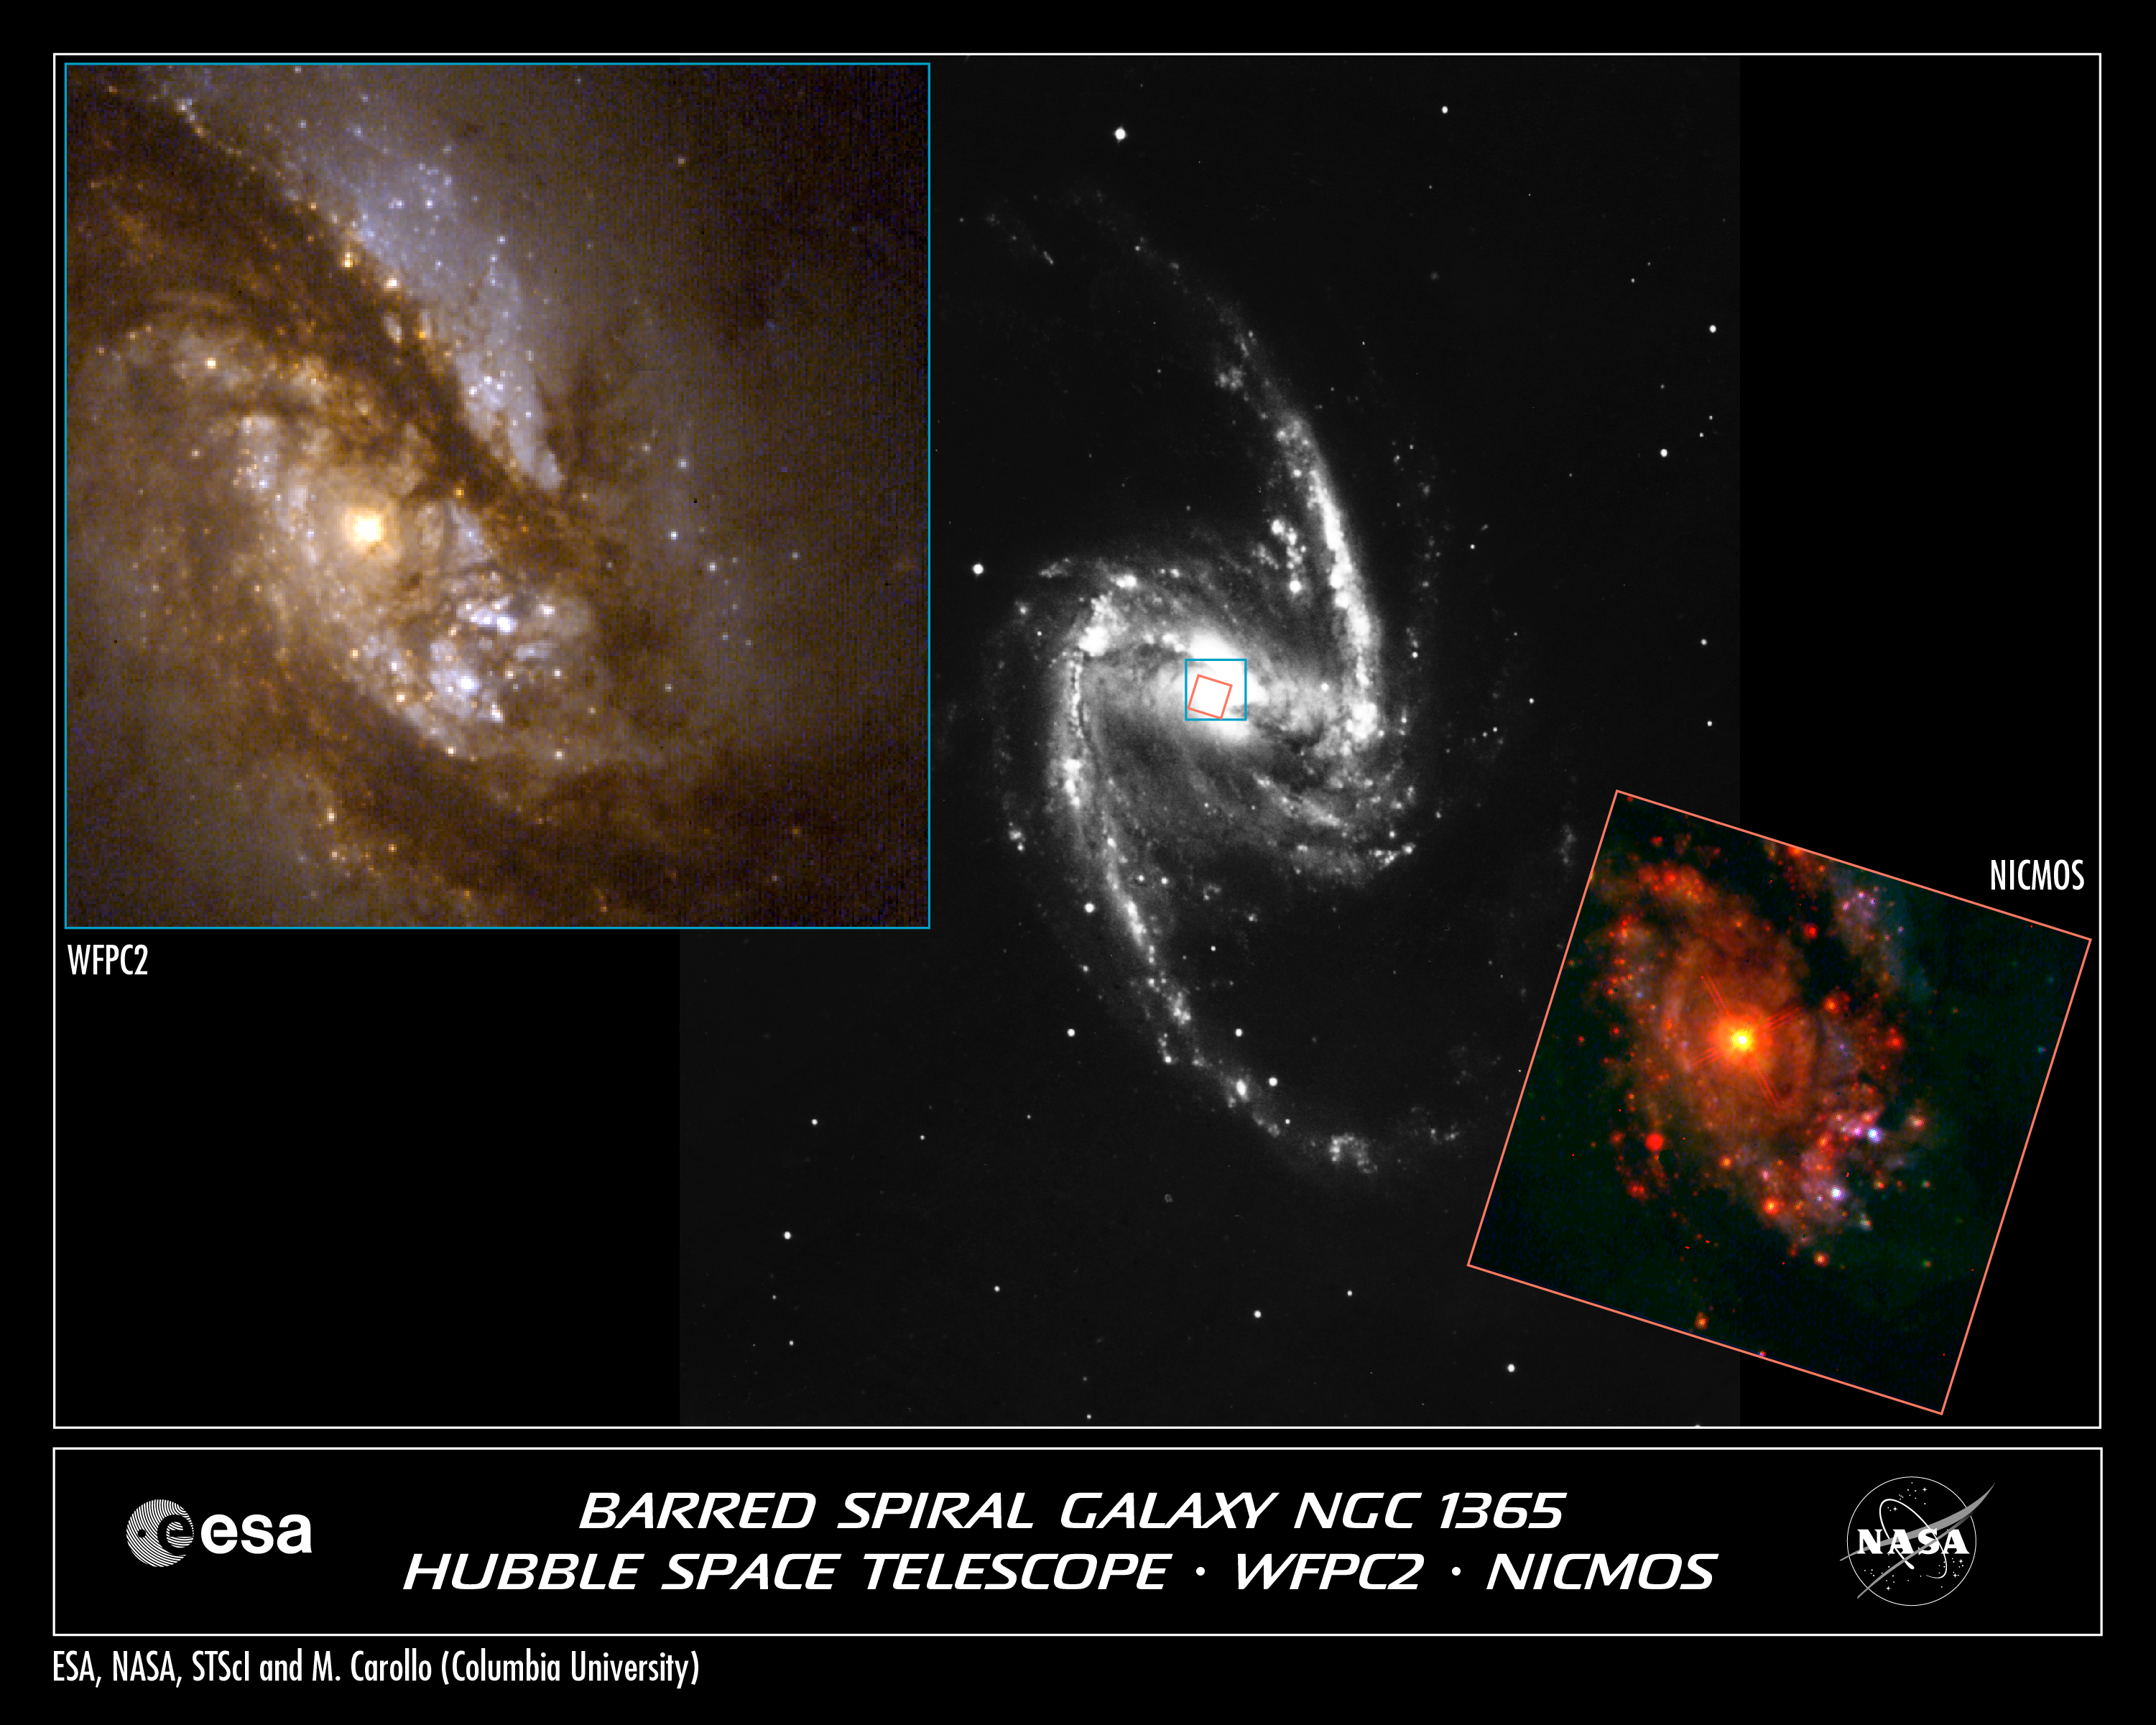

Central Bulges of Spiral Galaxies (Hubble and Ground-Based Views)

This collage of images in visible and infrared light reveals how the barred spiral galaxy NGC 1365 is feeding material into its central region, igniting massive star birth and probably causing its bulge of stars to grow. The material also is fueling a black hole in the galaxy's core. A galaxy's bulge is a central, football-shaped structure composed of stars, gas, and dust.

Credit: Allan Sandage (The Observatories of the Carnegie Institution of Washington) and John Bedke (Computer Sciences Corporation and the Space Telescope Science Institute), NASA, ESA, and Reynier Peletier (University of Nottingham, United Kingdom)